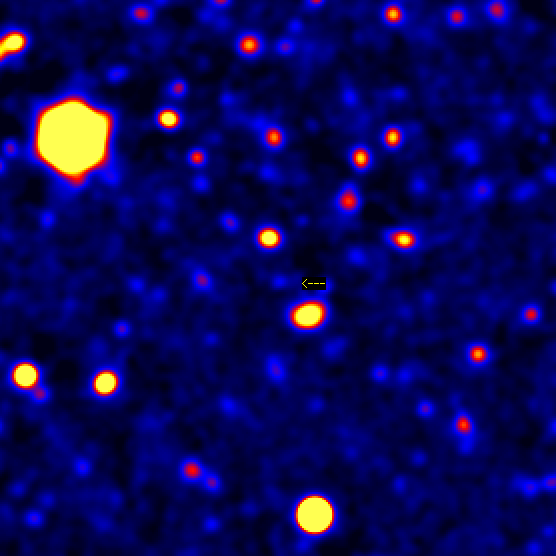

Gamma Ray Burst 971214

Image of the GRB 971214 field as seen about two months after the burst afterglow has faded away, revealing a faint galaxy at its position (marked with an arrow).

Credit: S. G. Djorgovski and S. R. Kulkarni (Caltech), the Caltech GRB Team and W. M. Keck Observatory